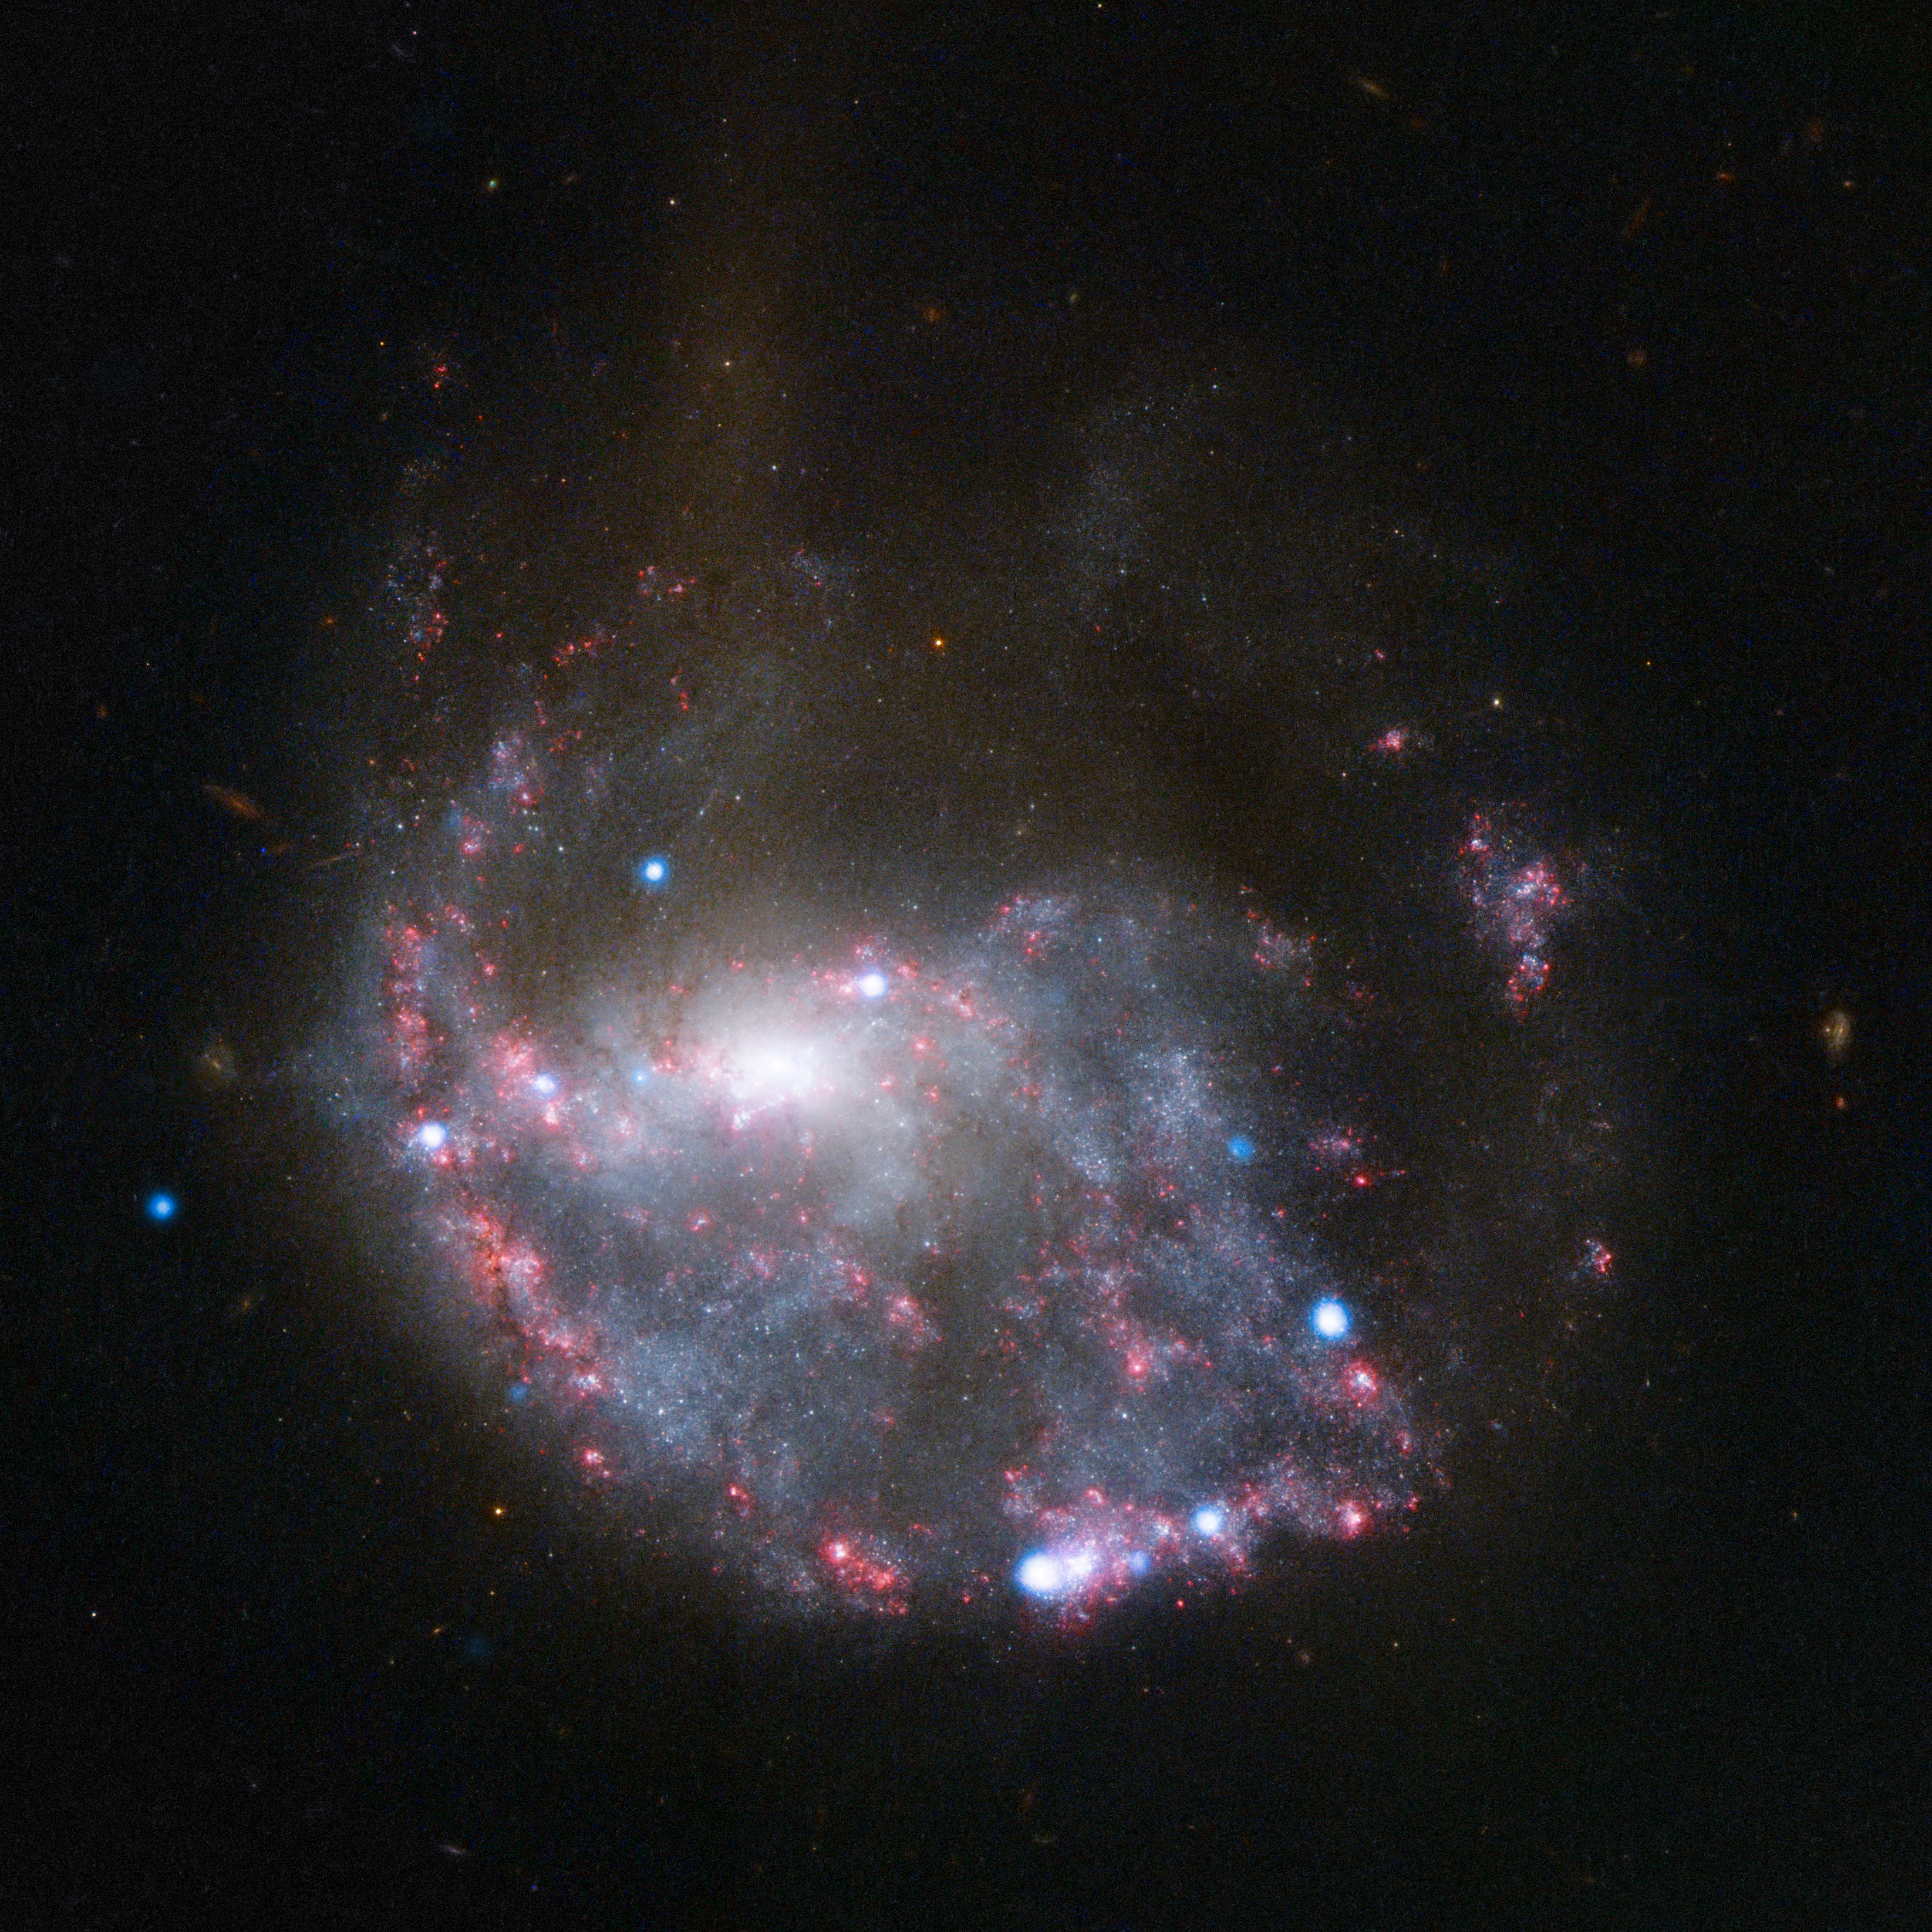

Hubble and Chandra composite view of NGC 922

An almost complete circle of bright pink nebulae skirts around a spiral galaxy in this NASA/ESA Hubble Space Telescope image of NGC 922. The ring structure and the galaxy’s distorted spiral shape result from a smaller galaxy scoring a cosmic bullseye, hitting the centre of NGC 922 some 330 million years ago. Dotted over this and shown in blue are X-ray sources dotted around the galaxy, spotted with the NASA Chandra X-ray Observatory.

Credit: NASA, ESA, CXC